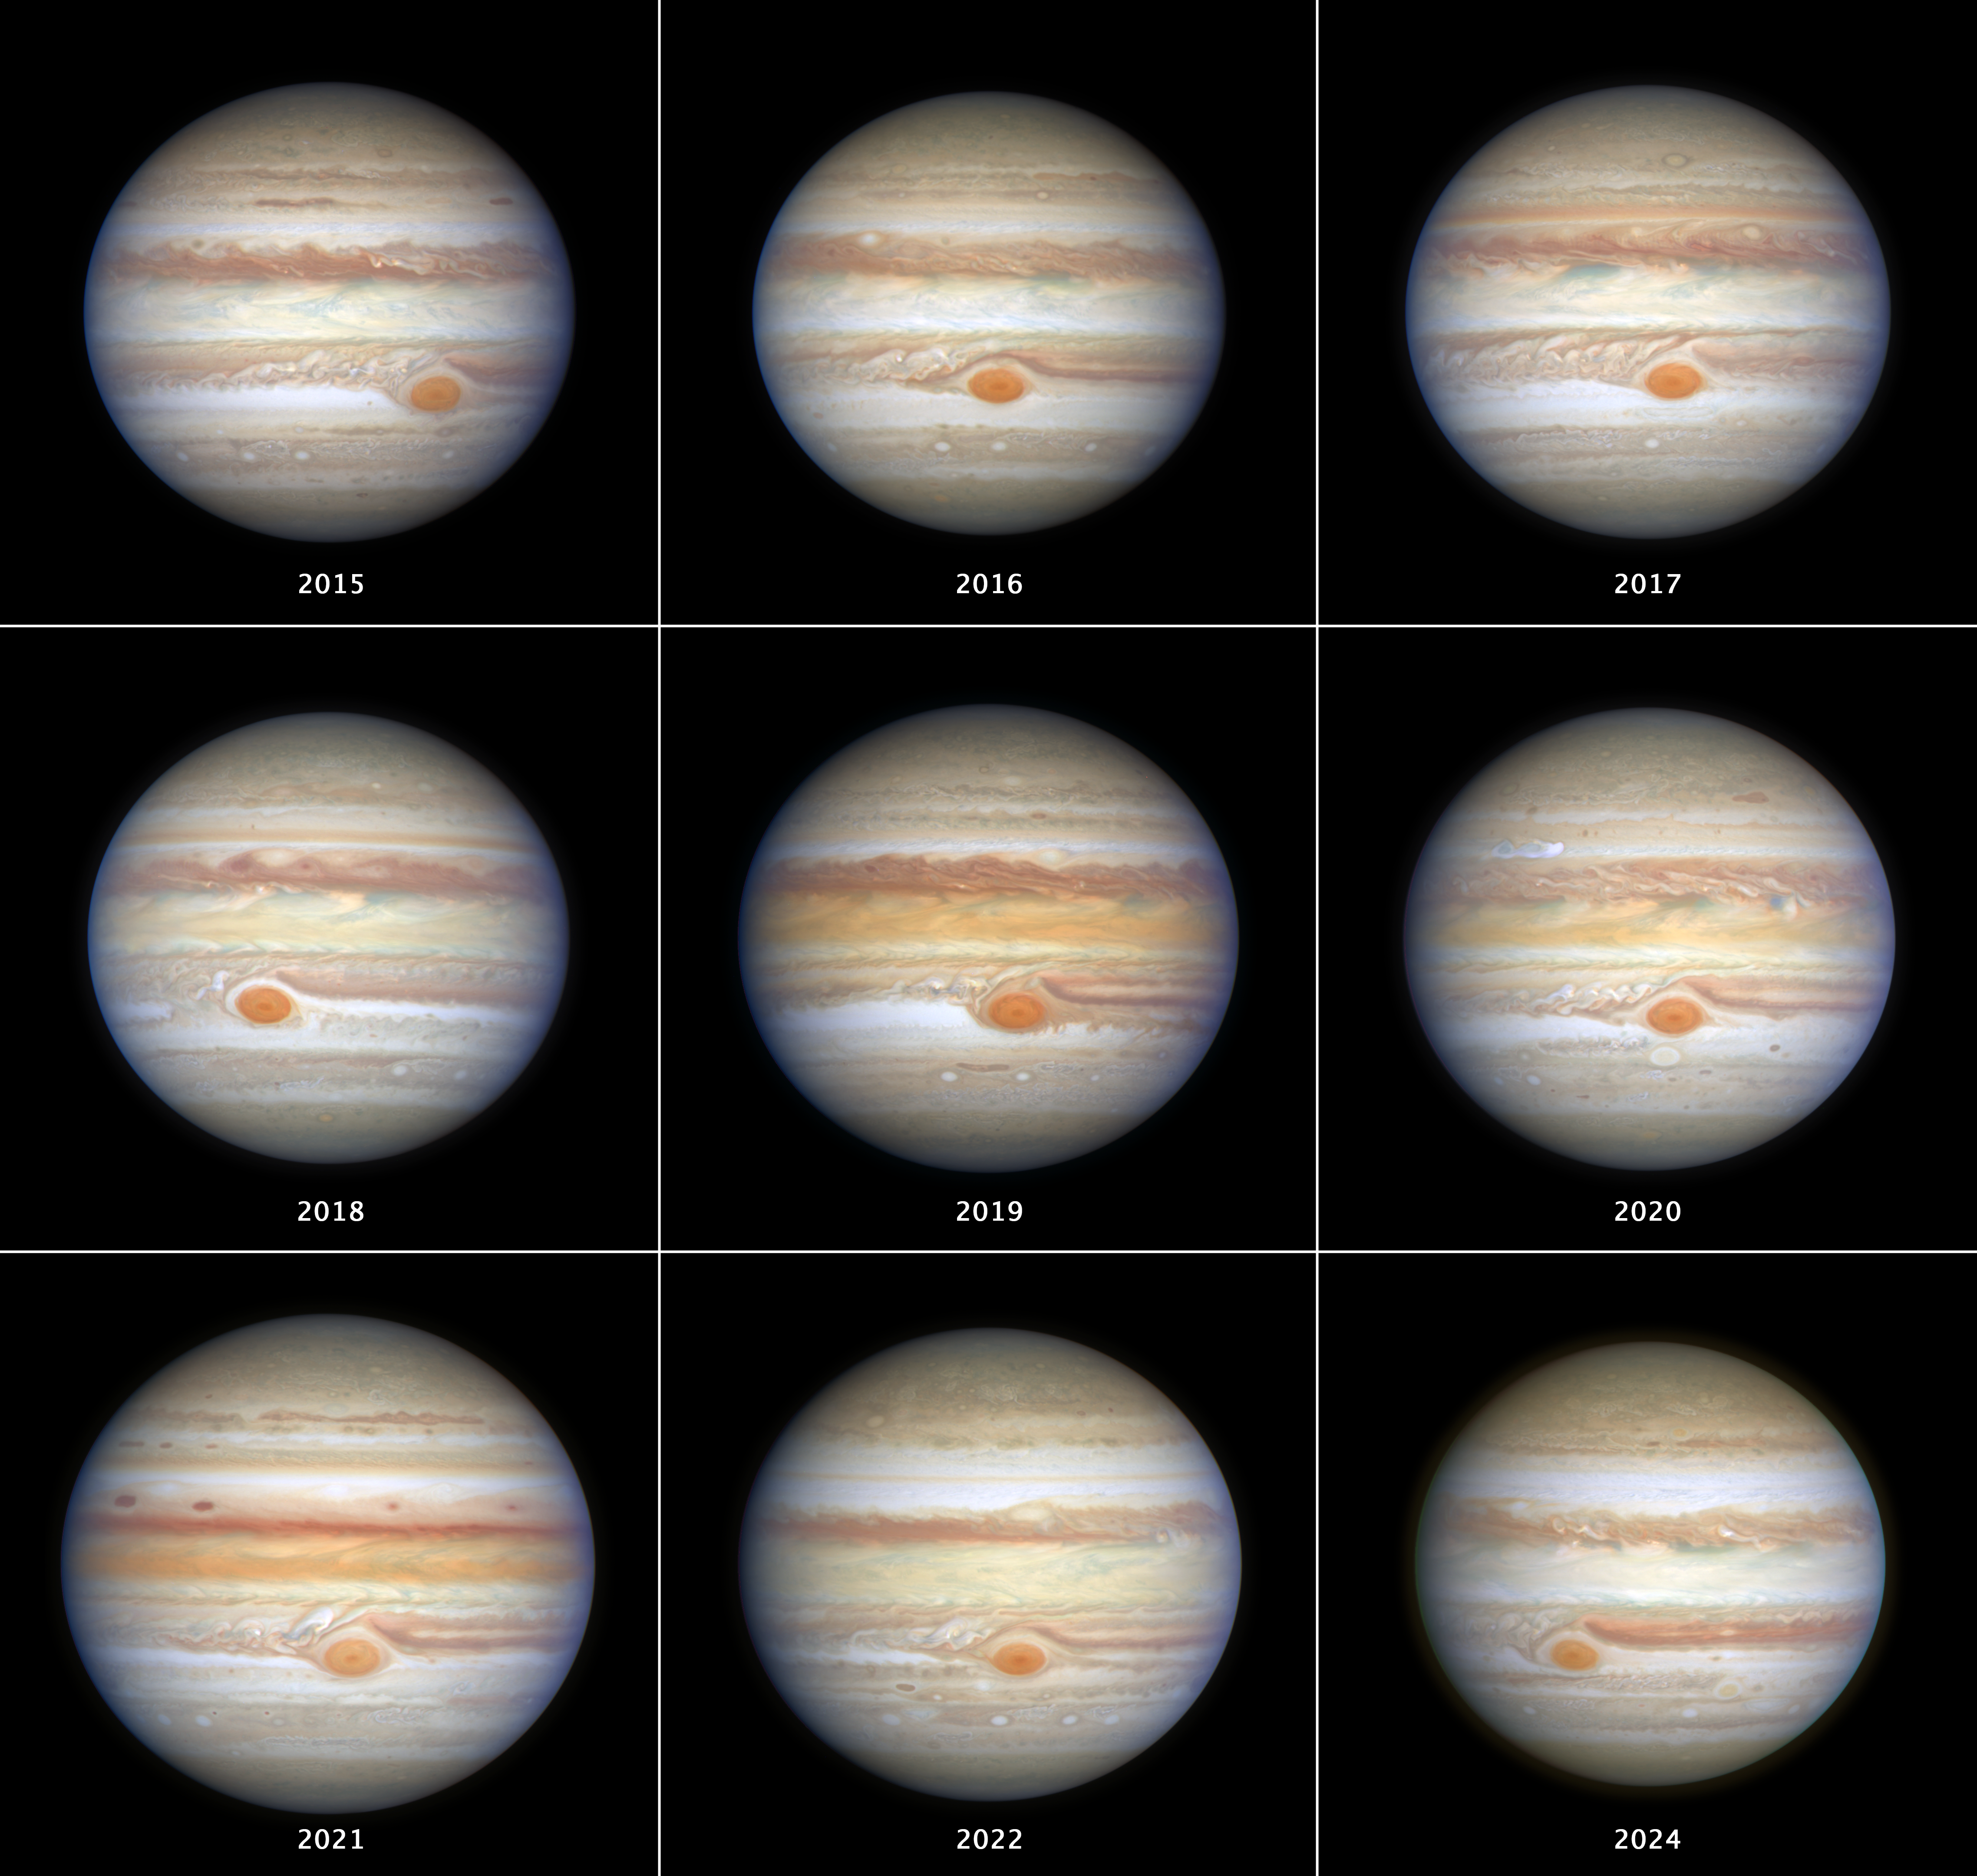

Hubble Jupiter OPAL observations (2015-2024)

A nine-panel collage showing Hubble images of Jupiter taken under the OPAL (Outer Planet Atmospheres Legacy) program from 2015-2024, with approximately true color. OPAL tracks the Great Red Spot (GRS) and other notable changes in Jupiter’s banded cloud structure of zones and belts over time.

Credit: NASA, ESA, A. Simon (GSFC), M. Wong (UC Berkeley), J. DePasquale (STScI)